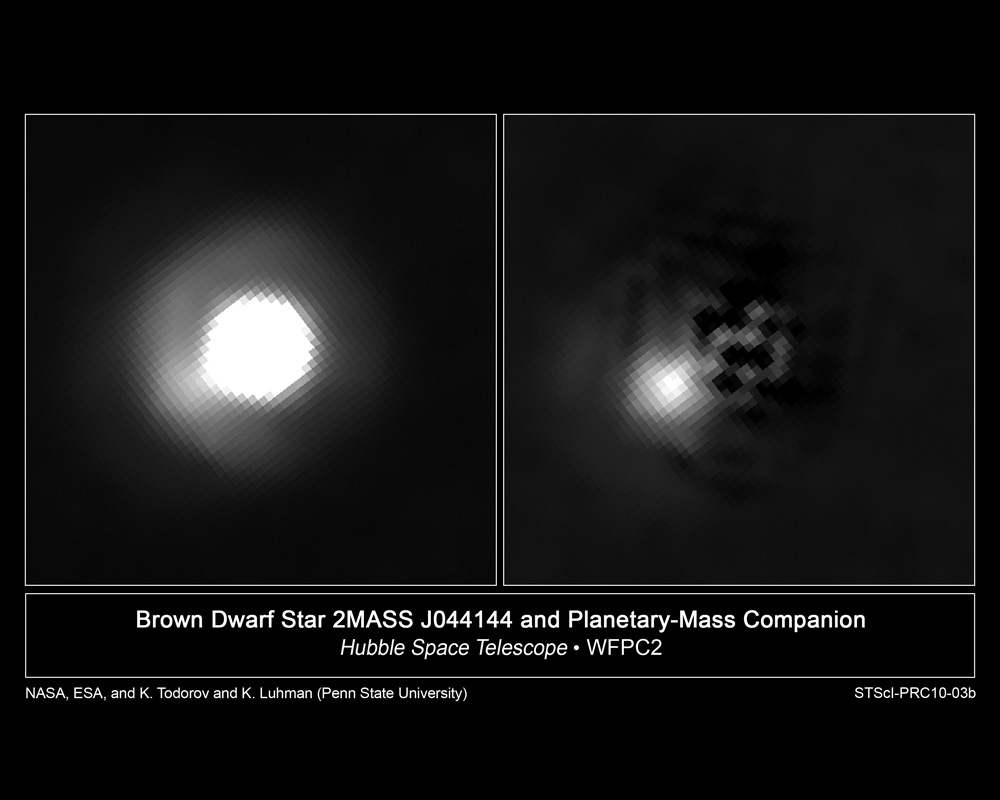

Brown dwarf and mystery companion

This is a Hubble Space Telescope image of young brown dwarf 2M J044144. It has a companion object at the 8 o'clock position that is estimated to be 5-10 times the mass of Jupiter. In the right panel, the light from the brown dwarf has been subtracted to provide a clearer view of the companion object. The separation of the companion corresponds to 2.2 billion kilometres at the distance of the Taurus star-forming region, which is only about 1 million years old. The companion may be a very small brown dwarf or a large planet, depending on how it formed. Images were taken with Hubble's Wide Field Planetary Camera 2 to track the motion of the two objects to see if they actually do travel across space together. Additional observations were done with the Gemini North telescope on Mauna Kea, Hawaii.

Credit: NASA, ESA, and K. Luhman (Penn State University)